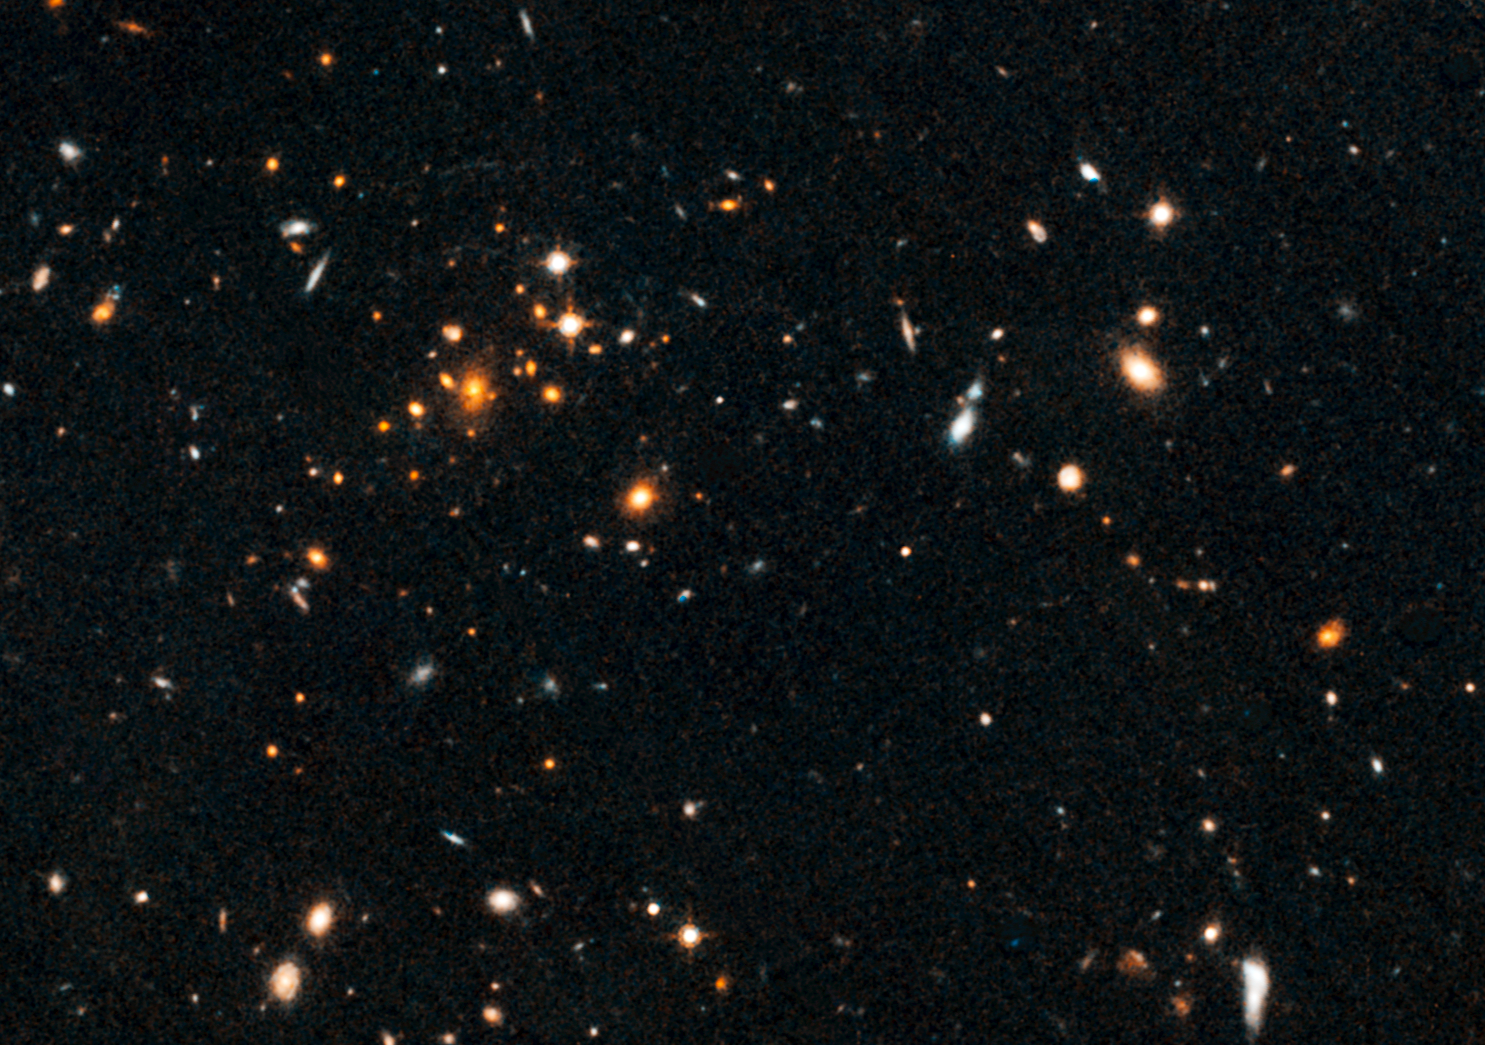

Galaxy cluster IDCS J1426.5+3508

Galaxy cluster IDCS J1426.5+3508

Credit: NASA, ESA/Hubble, and A. Gonzalez (University of Florida, Gainesville, USA), A. Stanford (University of California, Davis and Lawrence Livermore National Laboratory, USA) and M. Brodwin (University of Missouri-Kansas City and Harvard-Smithsonian Center for Astrophysics, USA).